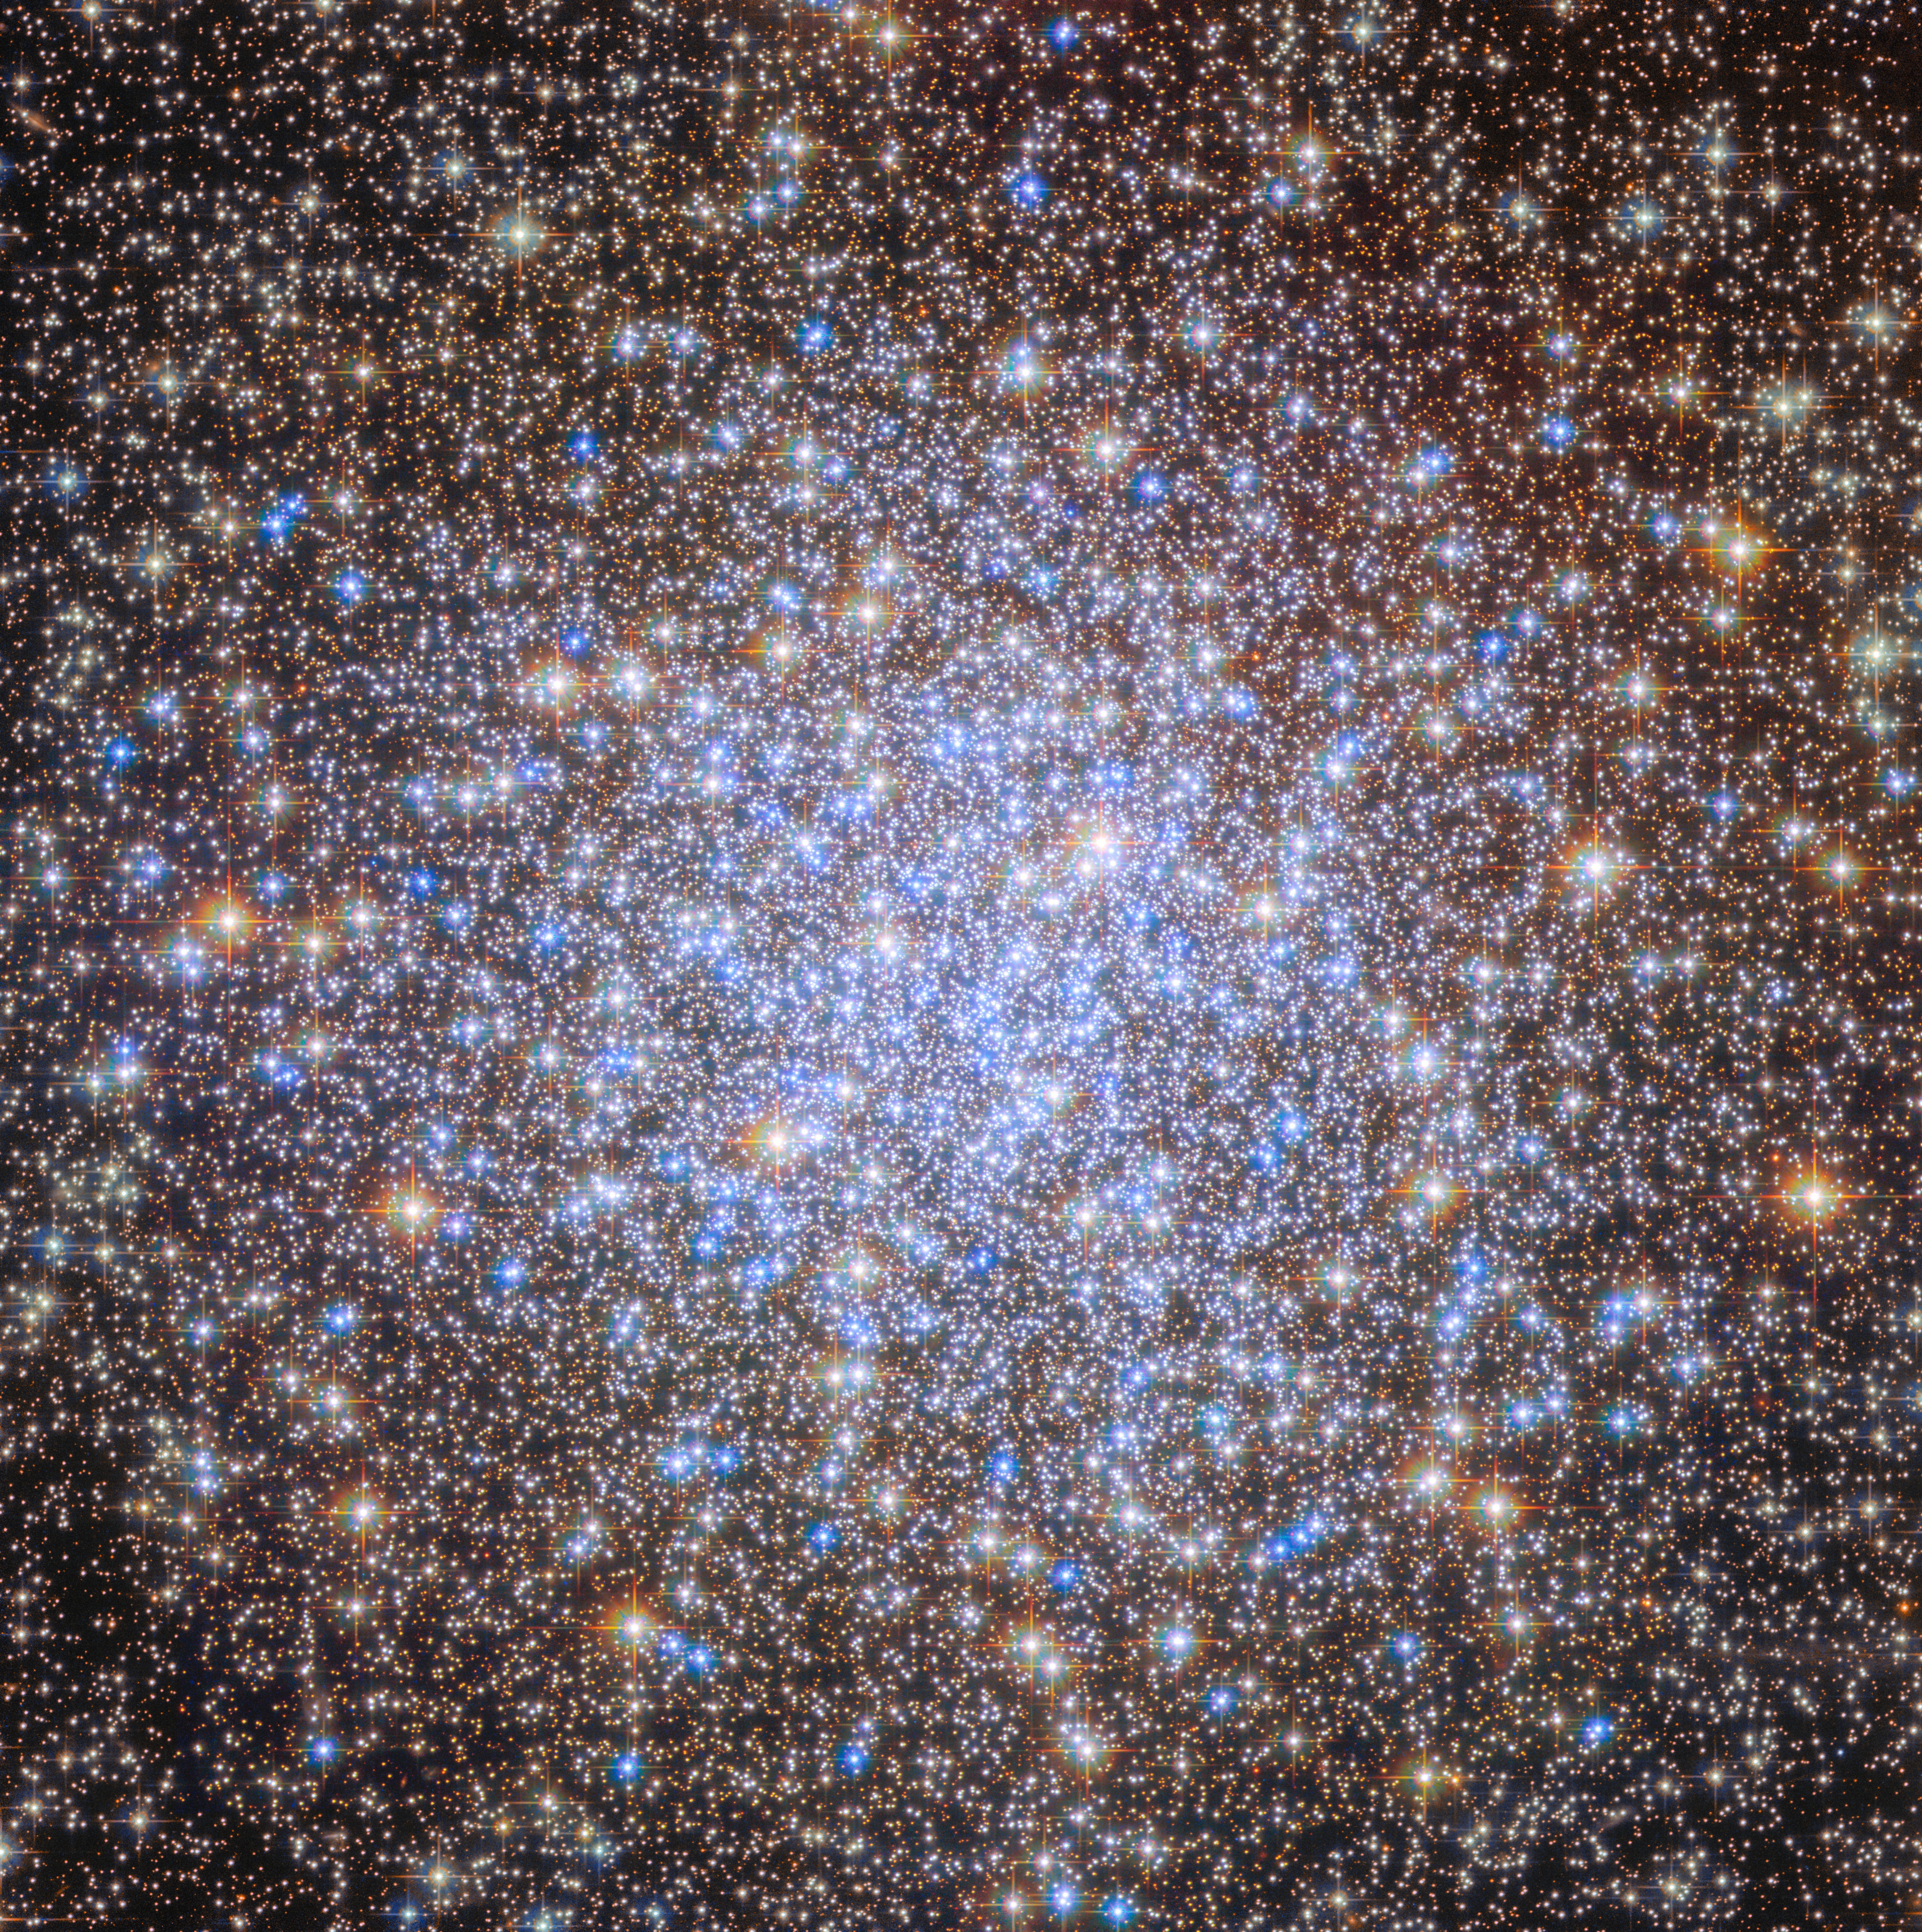

Starry chandelier

The subject of today’s ESA/Hubble Picture of the Month is an ancient inhabitant of our galaxy. This sparkling scene is of a globular cluster: a collection of tens of thousands to millions of stars, all tightly bound together under the influence of gravity. Astronomers know of more than 150 globular clusters in our galaxy, though there may be others yet to be discovered, hidden from view by dust or densely packed fields of stars.

This particular globular cluster is NGC 6723, sometimes called the Chandelier Cluster. Much like its namesake, this cluster sparkles with countless lights — but each ‘lightbulb’ in this chandelier is an individual star 27 000 light-years away in the constellation Sagittarius (the Archer).

Globular clusters like NGC 6723 contain some of the oldest stars in our galaxy. The ages of these clusters often exceed 10 billion years old, and some are nearly as old as the Universe itself. Globular clusters are thought to be some of the first structures to have formed in our galaxy, coalescing potentially billions of years before the thin disk of stars in which our Sun orbits. The details of how globular clusters formed, however, are not yet certain.

Astronomers initially thought that all stars in a globular cluster formed at the same time in a single flourish of star formation. This would mean that all stars in a globular cluster would be the same age and be made of the same mixture of chemical elements. Now, thanks to observations from telescopes like Hubble, researchers know that these seemingly simple stellar populations have more complex histories than originally thought.

Hubble first observed NGC 6723 as part of an ambitious survey dedicated to demystifying the properties of globular clusters in our Milky Way galaxy. In this observing programme (#10775, PI: Sarajedini), researchers used Hubble to study 65 globular clusters in our galaxy in visible and near-infrared light. These data allowed researchers to study everything from the ages of globular clusters to the process through which massive stars sink to the centre of a star cluster and lower-mass stars drift toward the cluster outskirts. This survey has been immensely scientifically valuable, and these observations have inspired several hundred published research papers.

In a later observing programme (#13297, PI: Piotto), researchers set their sights again on many of these same clusters, including NGC 6723. This time, they used Hubble’s unique sensitivity to ultraviolet light to detect the subtle variations in chemical composition between the stars of globular clusters and determine the age spread among the clusters’ stars. For NGC 6723, researchers found evidence of two closely-spaced periods of star formation, the second occurring within 634 million years of the first. (‘Closely-spaced’ is relative; 634 million years is a blink of an eye for a star cluster that is more than 10 billion years old!)

Thanks to these findings, astronomers are on the path to understanding how and when globular clusters formed — and Hubble observations of celestial chandeliers like NGC 6723 are lighting the way.

Credit: ESA/Hubble & NASA, A. Sarajedini, G. Piotto